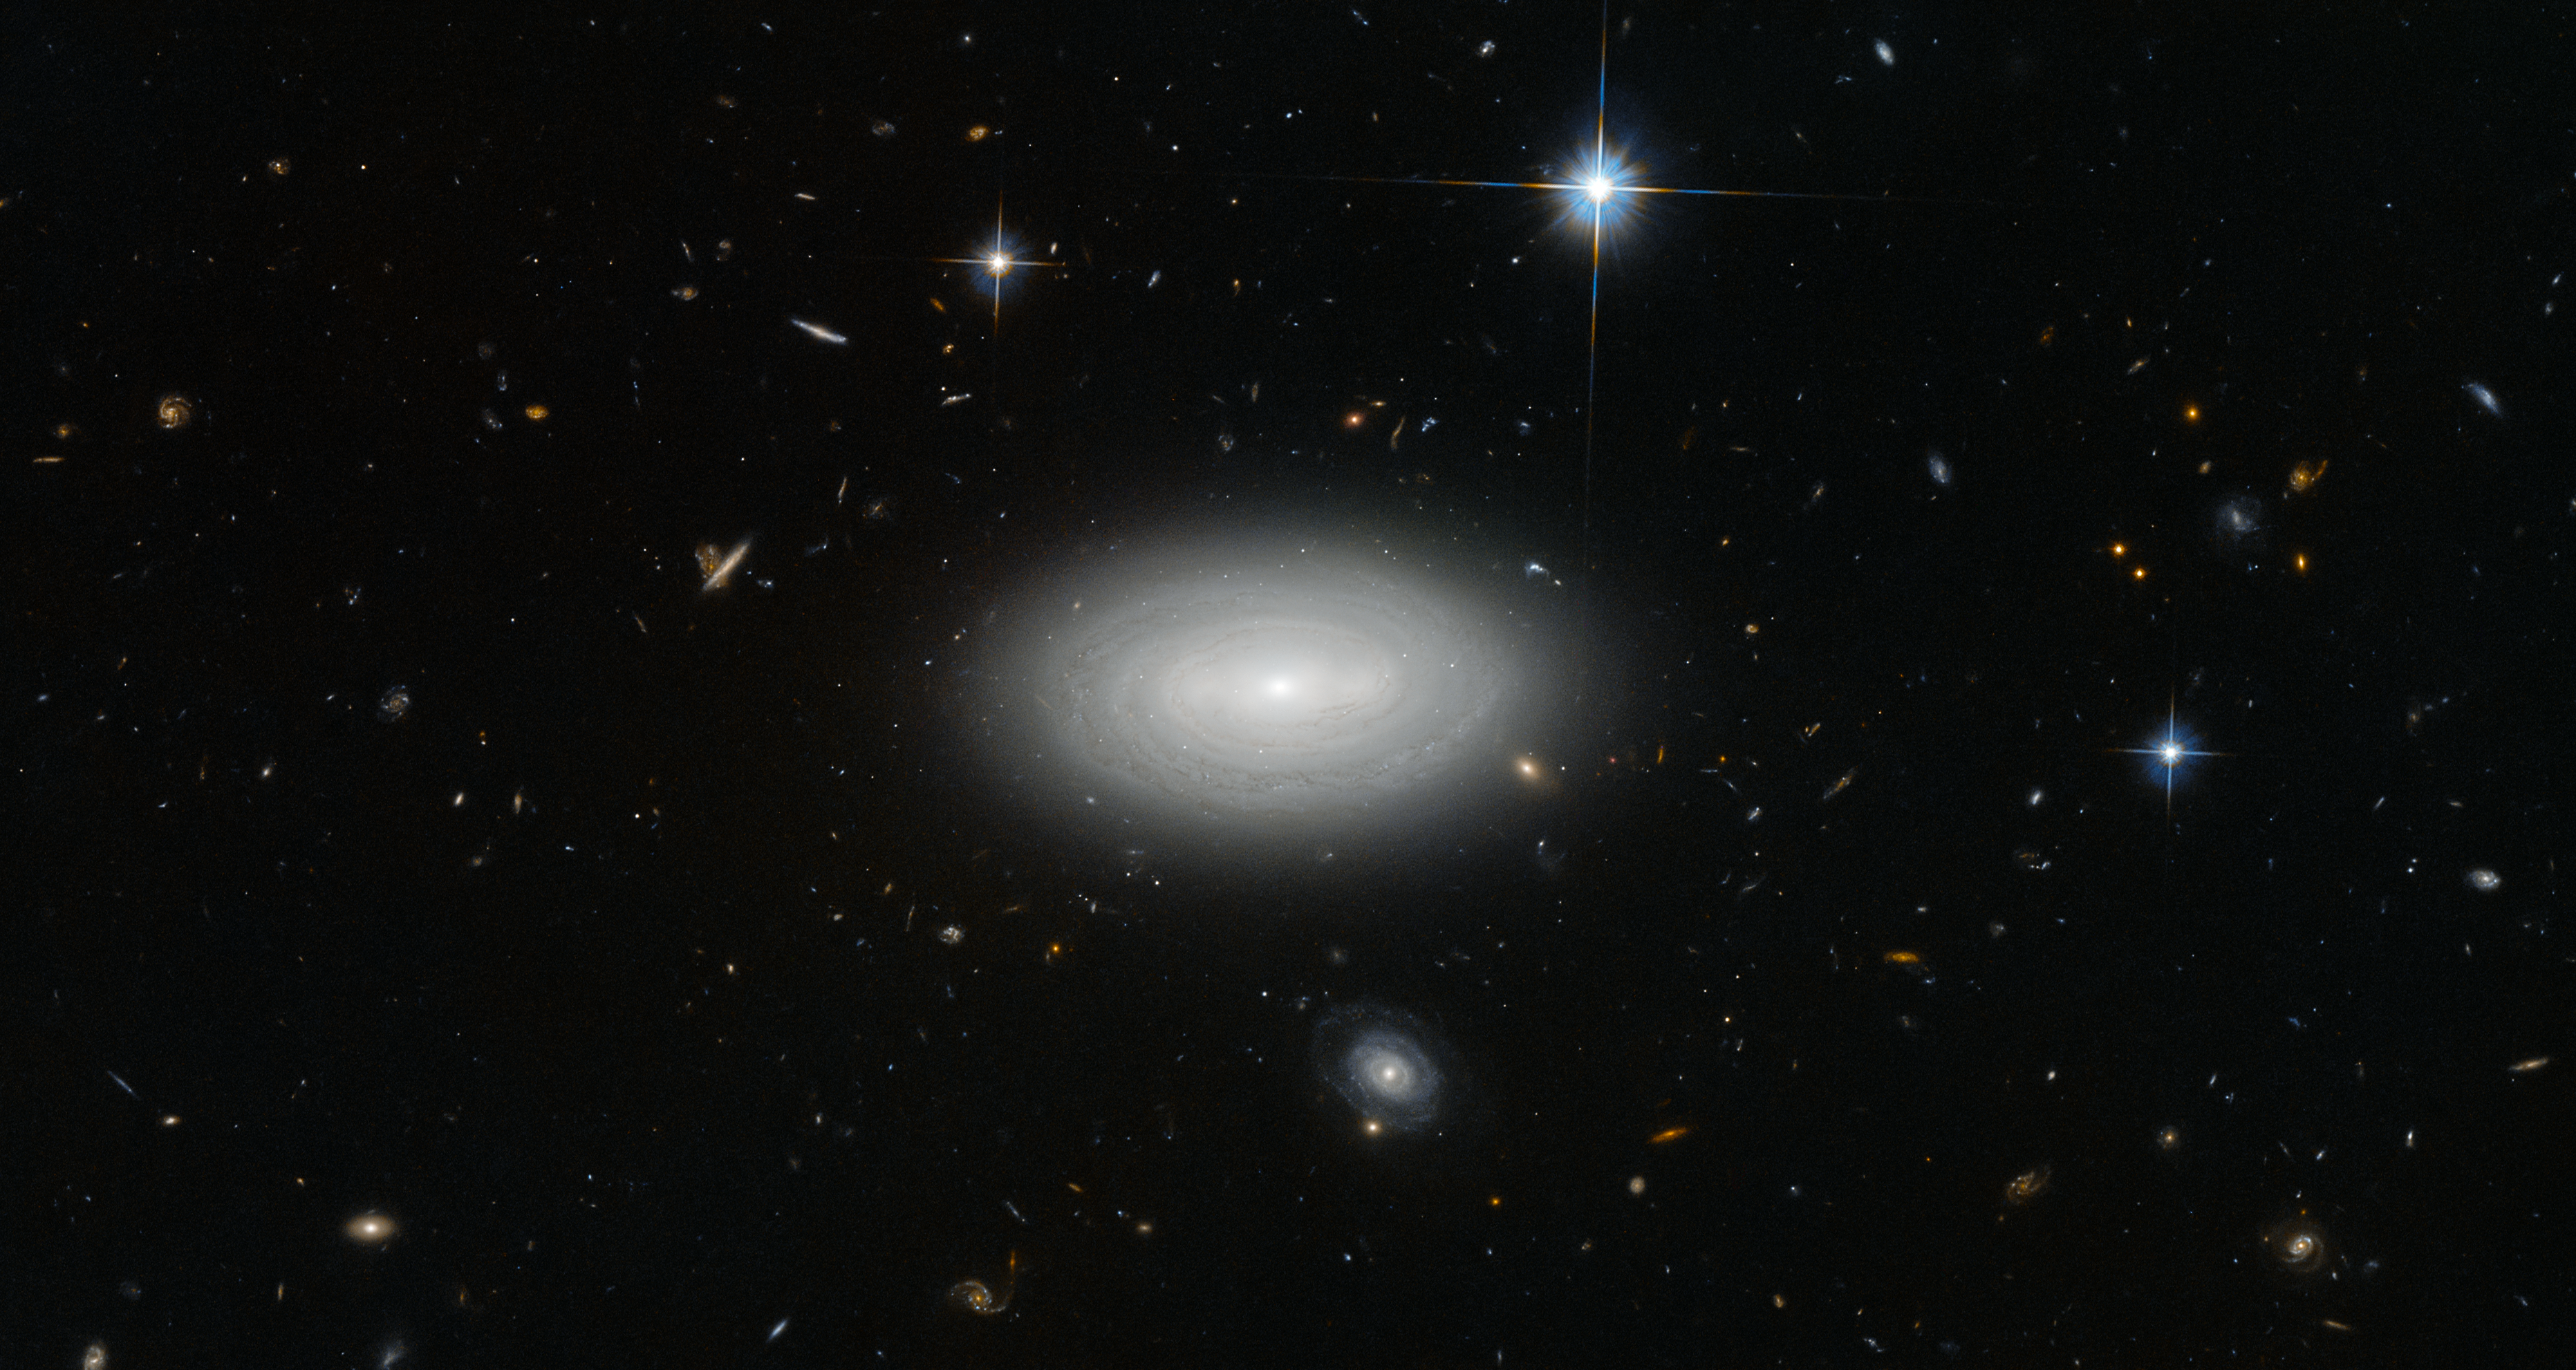

The loneliest of galaxies

Only three local stars appear in this image, quartered by right-angled diffraction spikes. Everything besides them is a galaxy; floating like a swarm of microbes in a drop of water, and brought into view here not by a microscope, but by the Advanced Camera for Surveys on the Hubble Space Telescope.

In the foreground, the spiral arms of MCG+01-02-015 seem to wrap around one another, cocooning the galaxy. The scene suggests an abundance of galactic companionship for MCG+01-02-015, but this is a cruel trick of perspective. Instead, MCG+01-02-015’s unsentimental naming befits its position within the cosmos: It is a void galaxy, the loneliest of galaxies.

The vast majority of galaxies are strung out along galaxy filaments — thread-like formations that make up the large-scale structure of the Universe — drawn together by the influence of gravity into sinuous threads weaving through space. Between these filaments stretch shallow but immense voids; the Universe’s wastelands, where, outside of the extremely rare presence of a galaxy, there is very little matter — about one atom per cubic metre. One such desolate stretch of space is what MCG+01-02-015 reluctantly calls home. The galaxy is so isolated that if our galaxy, the Milky Way, were to be situated in the same way, we would not have known of the existence of other galaxies until the 1960s.

Credit: ESA/Hubble & NASA and N. Grogin (STScI)
Acknowledgement: Judy Schmidt